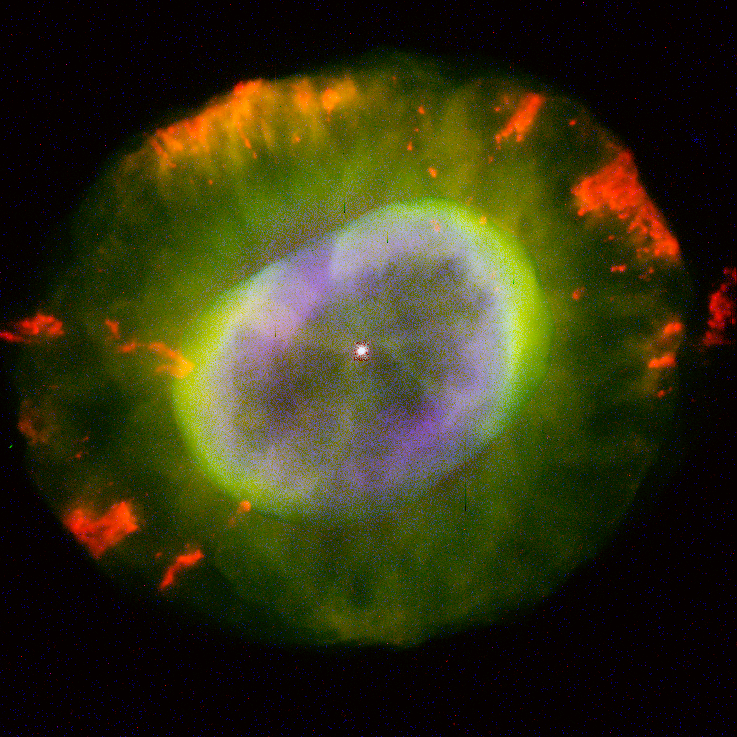

NGC 7662

This image is a part of the Hubble Gallery of Planetary Nebulae.

Credit: Bruce Balick and Jason Alexander (University of Washington), Arsen Hajian (S. Naval Observatory), Yervant Terzian (Cornell University), Mario Perinotto (University of Florence), Patrizio Patriarchi (Arcetri Observatory) and NASA/ESA